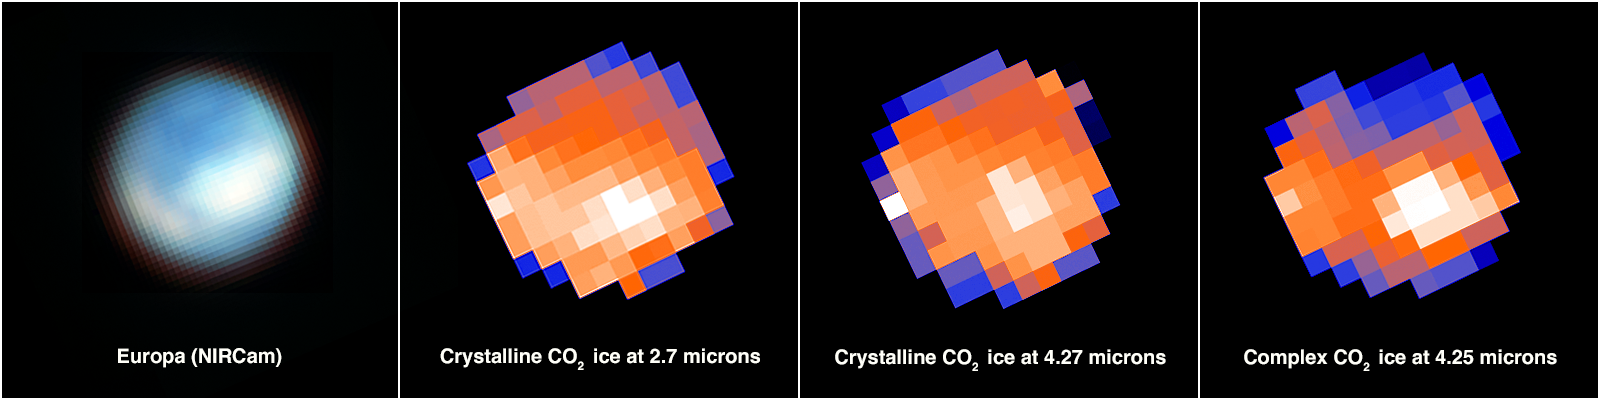

Map of Europa's surface

This graphic shows a map of Europa’s surface with NIRCam (Near Infrared Camera) in the first panel and compositional maps derived from NIRSpec/IFU (Near Infrared Spectrograph’s Integral Field Unit) data in the following three panels. In the compositional maps, the white pixels correspond to carbon dioxide in the large-scale region of disrupted chaos terrain known as Tara Regio (centre and right), with additional concentrations within portions of the chaos region Powys Regio (left). The second and third panels show evidence of crystalline carbon dioxide, while the fourth panel indicates a complexed and amorphous form of carbon dioxide.

Astronomers using Webb have found carbon on the chaos terrain of Tara Regio and Powys Regio. Surface ices in these regions have been disrupted, and there has likely been a relatively recent exchange of material between the subsurface ocean and the icy surface. Carbon, a universal building block for life as we know it, likely originated in Europa’s ocean. The discovery suggests a potentially habitable environment in the salty subsurface ocean of Europa.

The NIRSpec/IFU images appear pixelated because Europa is 10 x 10 pixels across in the detector’s field of view.

Credit: NASA, ESA, CSA, G. Villanueva (NASA/GSFC), S. Trumbo (Cornell Univ.), A. Pagan (STScI)